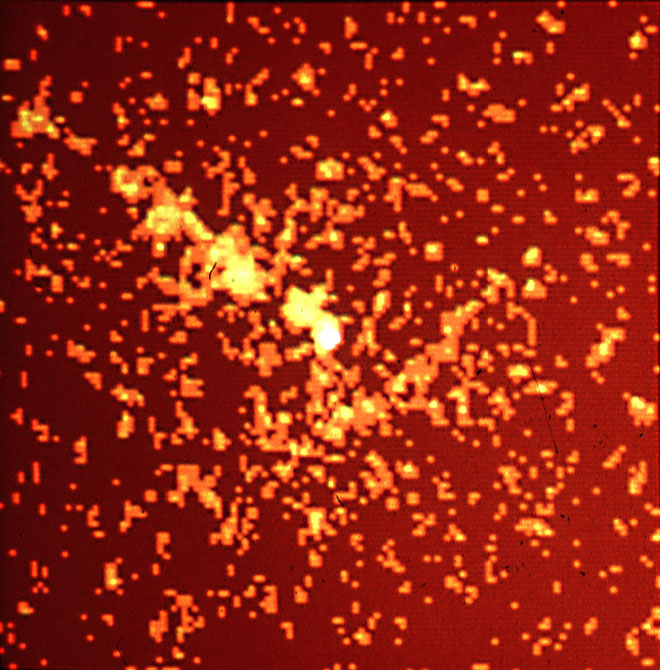

Einstein X-ray 1979 deconvolved

1979 deconvolution of Einstein Observatory's X-ray images of Centaurus A.

Credit: E.J. Schreier (STScI), and NASA/ESA